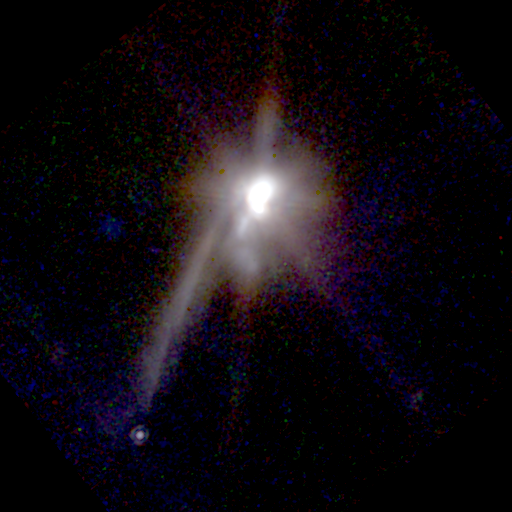

Hubble's First Direct Look at Possible Planet Around Another Star

This NASA/ESA Hubble Telescope near-infrared image of newborn binary stars (image center) reveals a long thin nebula pointing toward a faint companion object (bottom left) which could be the first extrasolar planet to be imaged directly.

Credit: Susan Terebey (Extrasolar Research Corp.), and NASA/ESA